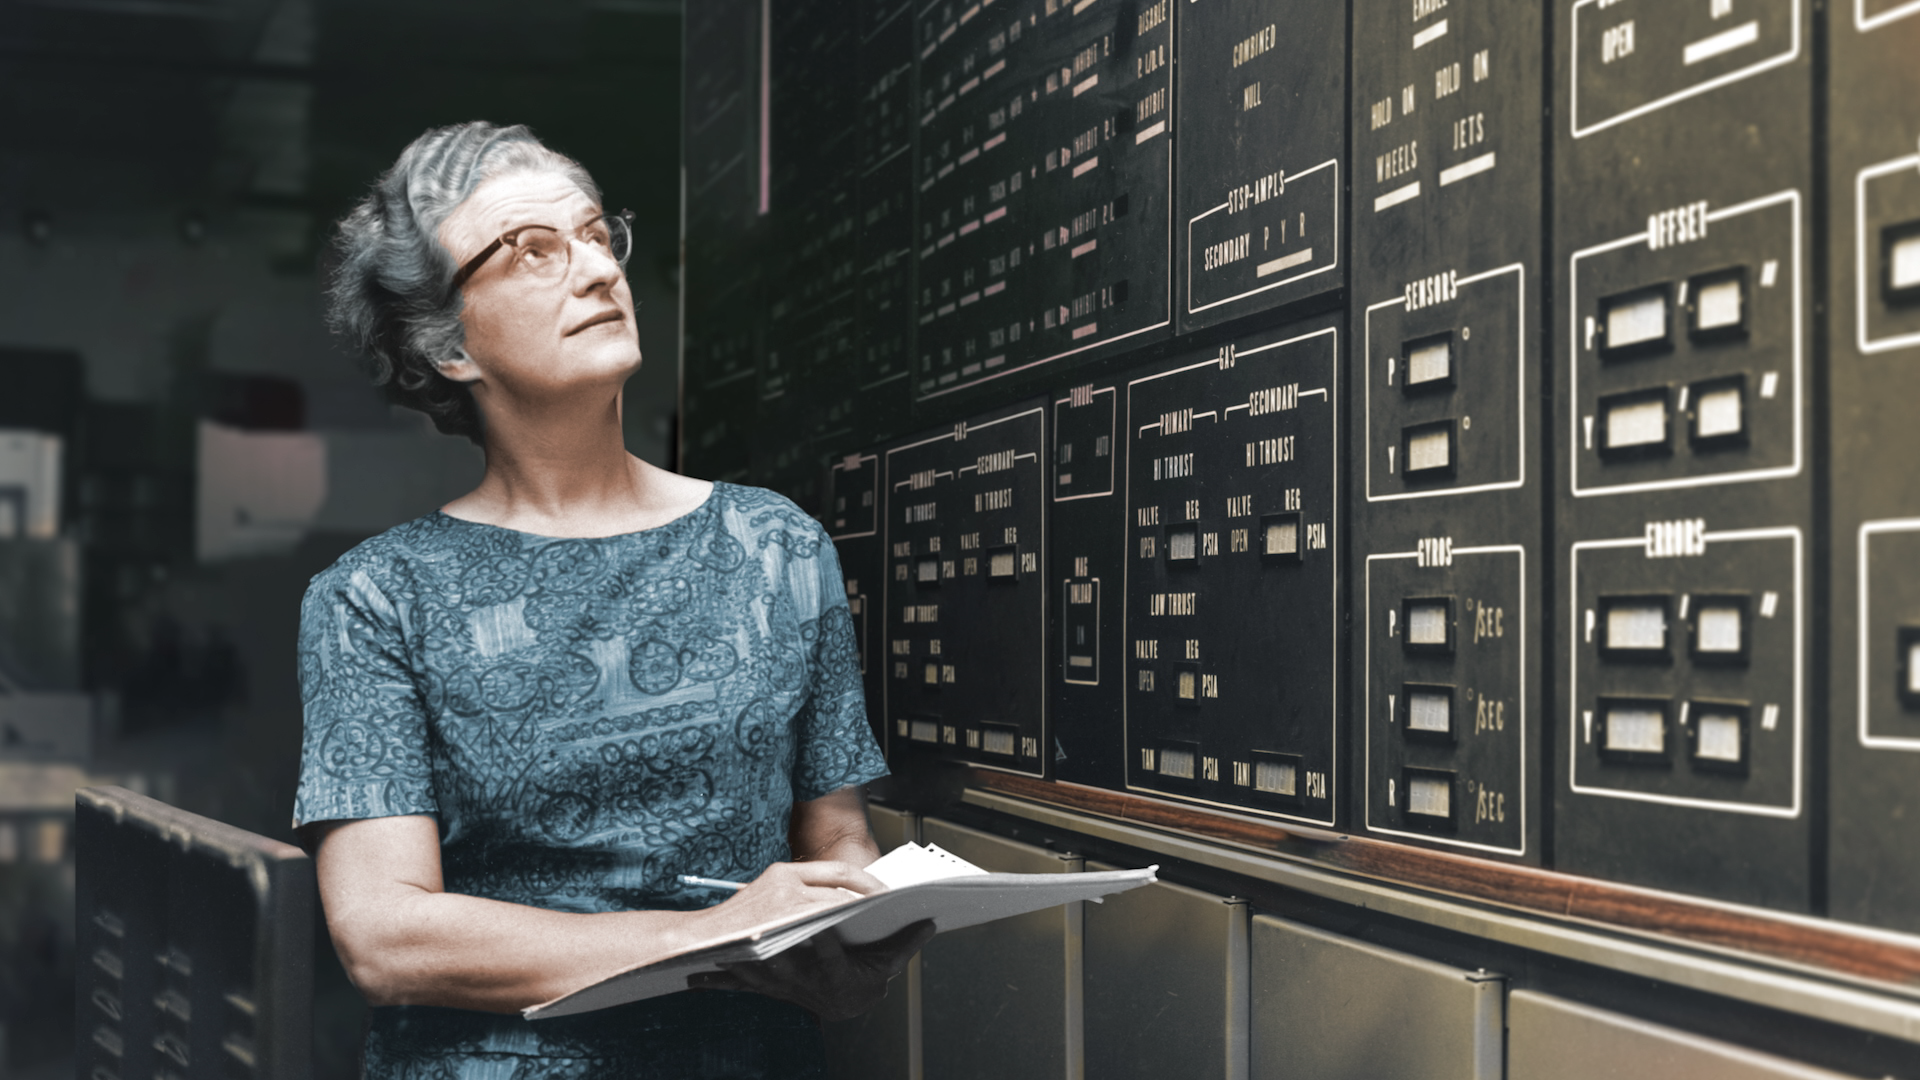

Still from Hubblecast 113

Still from Hubblecast 113 about Nancy Roman — the mother of Hubble.

Credit: ESA/Hubble